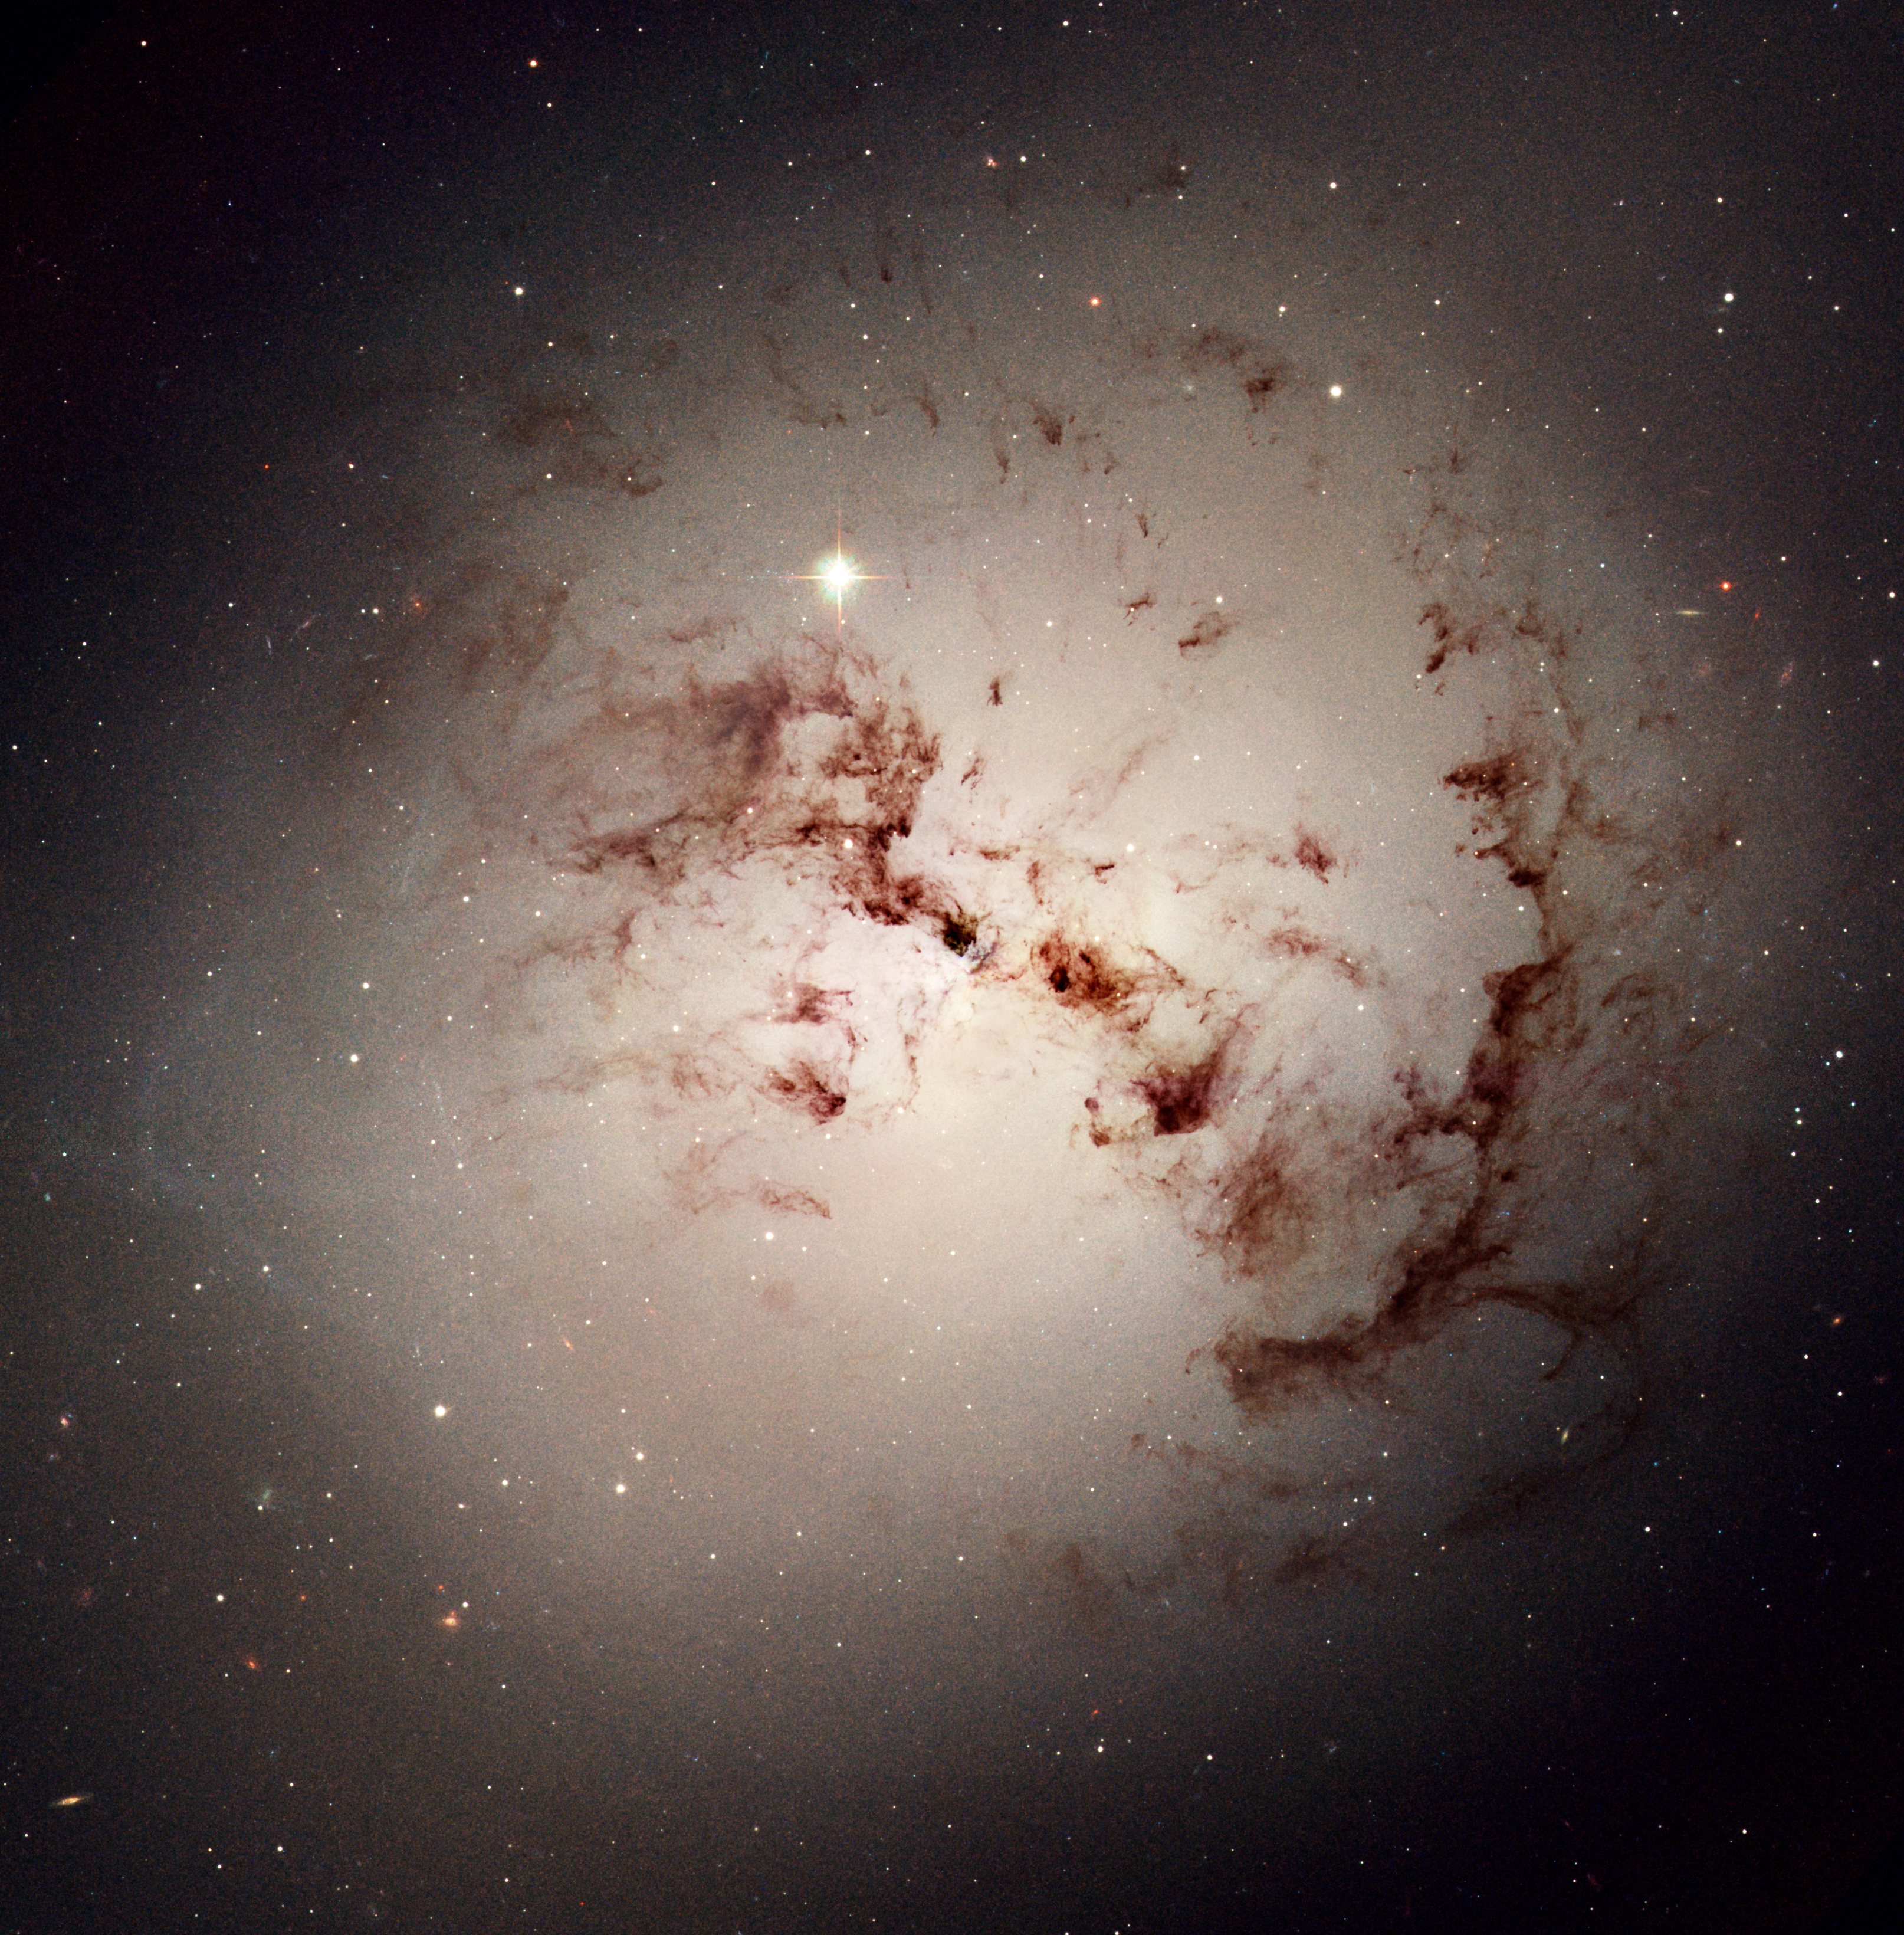

Hubble spies cosmic dust bunnies

Like dust bunnies that lurk in corners and under beds, surprisingly complex loops and blobs of cosmic dust lie hidden in the giant elliptical galaxy NGC 1316. This image made from data obtained with the NASA/ESA Hubble Space Telescope reveals the dust lanes and star clusters of this giant galaxy that give evidence that it was formed from a past merger of two gas-rich galaxies.

Credit: NASA, ESA, and The Hubble Heritage Team (STScI/AURA)